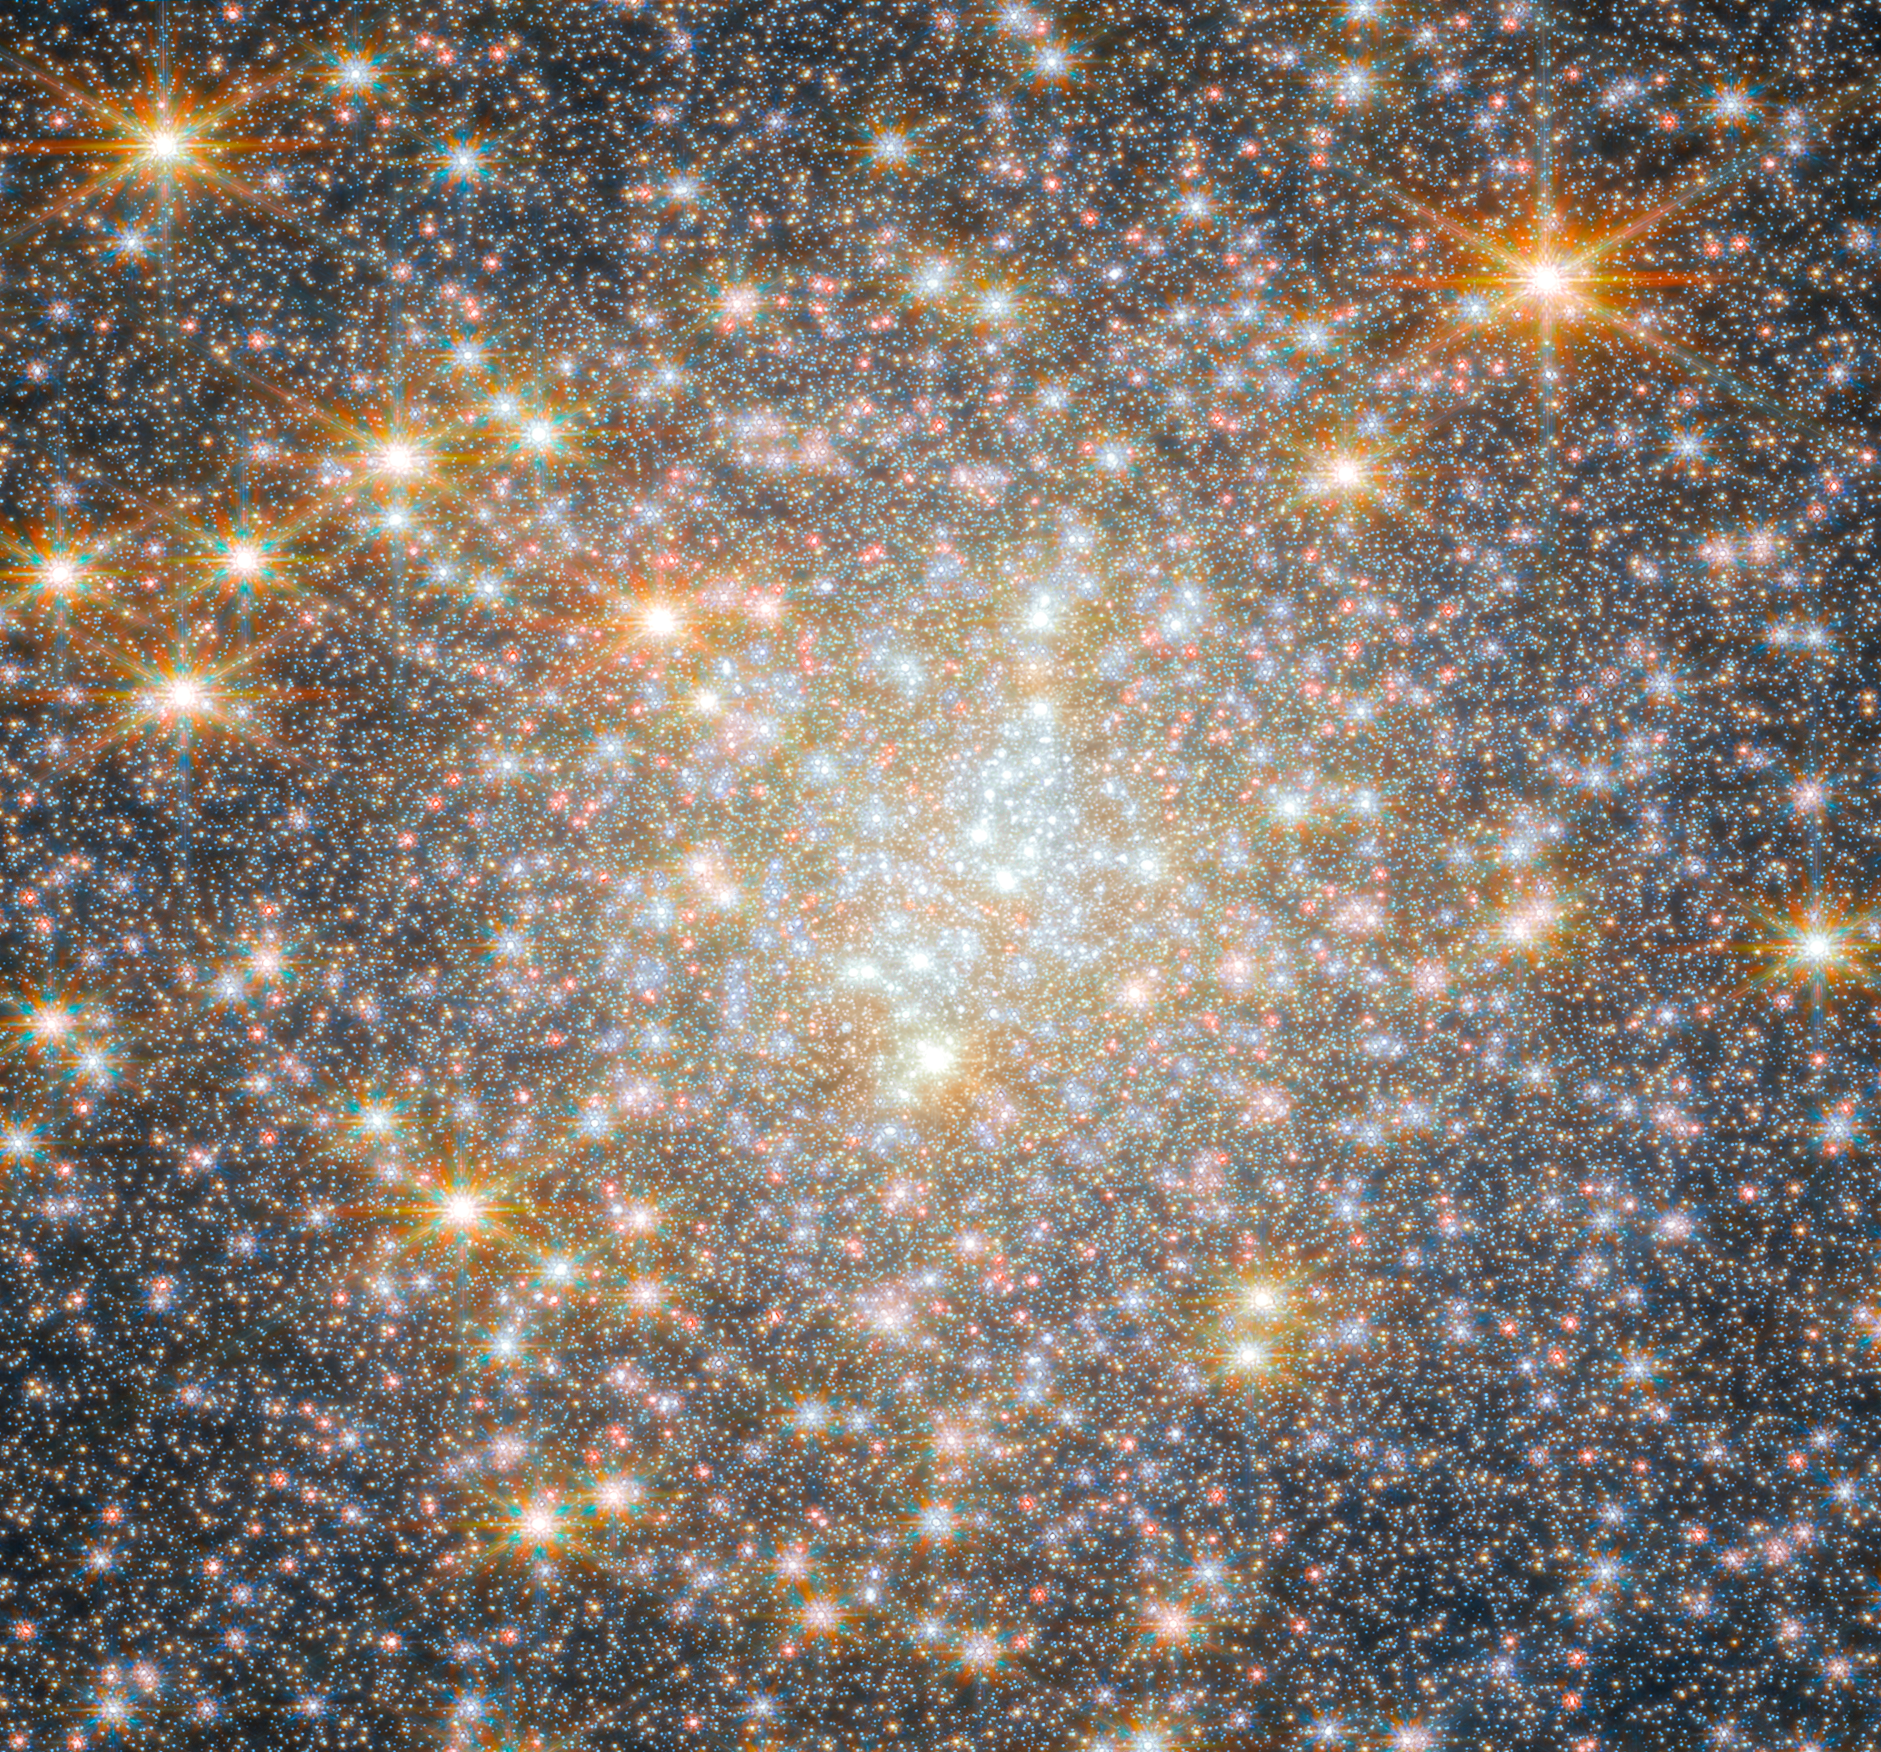

Webb’s view of NGC 6440 (cropped)

Featured in this new image from the NASA/ESA/CSA James Webb Space Telescope is NGC 6440, a globular cluster that resides roughly 28 000 light-years from Earth in the constellation Sagittarius. The object was first discovered by William Herschel in May of 1786.

Globular clusters like NGC 6440 are roughly spherical, tightly packed, collections of old stars bound together by gravity. They can be found throughout galaxies, but often live on the outskirts. They hold hundreds of thousands to millions of stars that are on average about one light-year apart, but they can be as close together as the size of our Solar System. NGC 6440 is known to be a high-mass and metal-rich cluster that formed and is orbiting within the Galactic bulge, which is a dense, near-spherical region of old stars in the inner part of the Milky Way.

This image was obtained with 2023 data from Webb’s Near-InfraRed Camera (NIRCam) as part of an observation programme to explore the stars in the cluster and to investigate details of the cluster’s pulsars. A pulsar is a highly magnetised, rotating neutron star that emits a beam of electromagnetic radiation from their magnetic poles. To us, that beam appears as a short burst or pulse as the star rotates. Pulsars spin extremely fast. Astronomers have clocked the fastest pulsars at more than 716 rotations per second, but a pulsar could theoretically rotate as fast as 1500 rotations per second before slowly losing energy or breaking apart.

The new data obtained by the science team indicate the first evidence from Webb observations of abundance variations of helium and oxygen in stars in a globular cluster. These results open the window for future, in-depth investigations of other clusters in the Galactic bulge, which were previously infeasible with other telescope facilities given the significant crowding of stars in the cluster and the strong reddening caused by interstellar dust between the cluster and Earth.

You can learn more about this image here.

Credit: ESA/Webb, NASA & CSA, P. Freire Acknowledgement: M. Cadelano and C. Pallanca